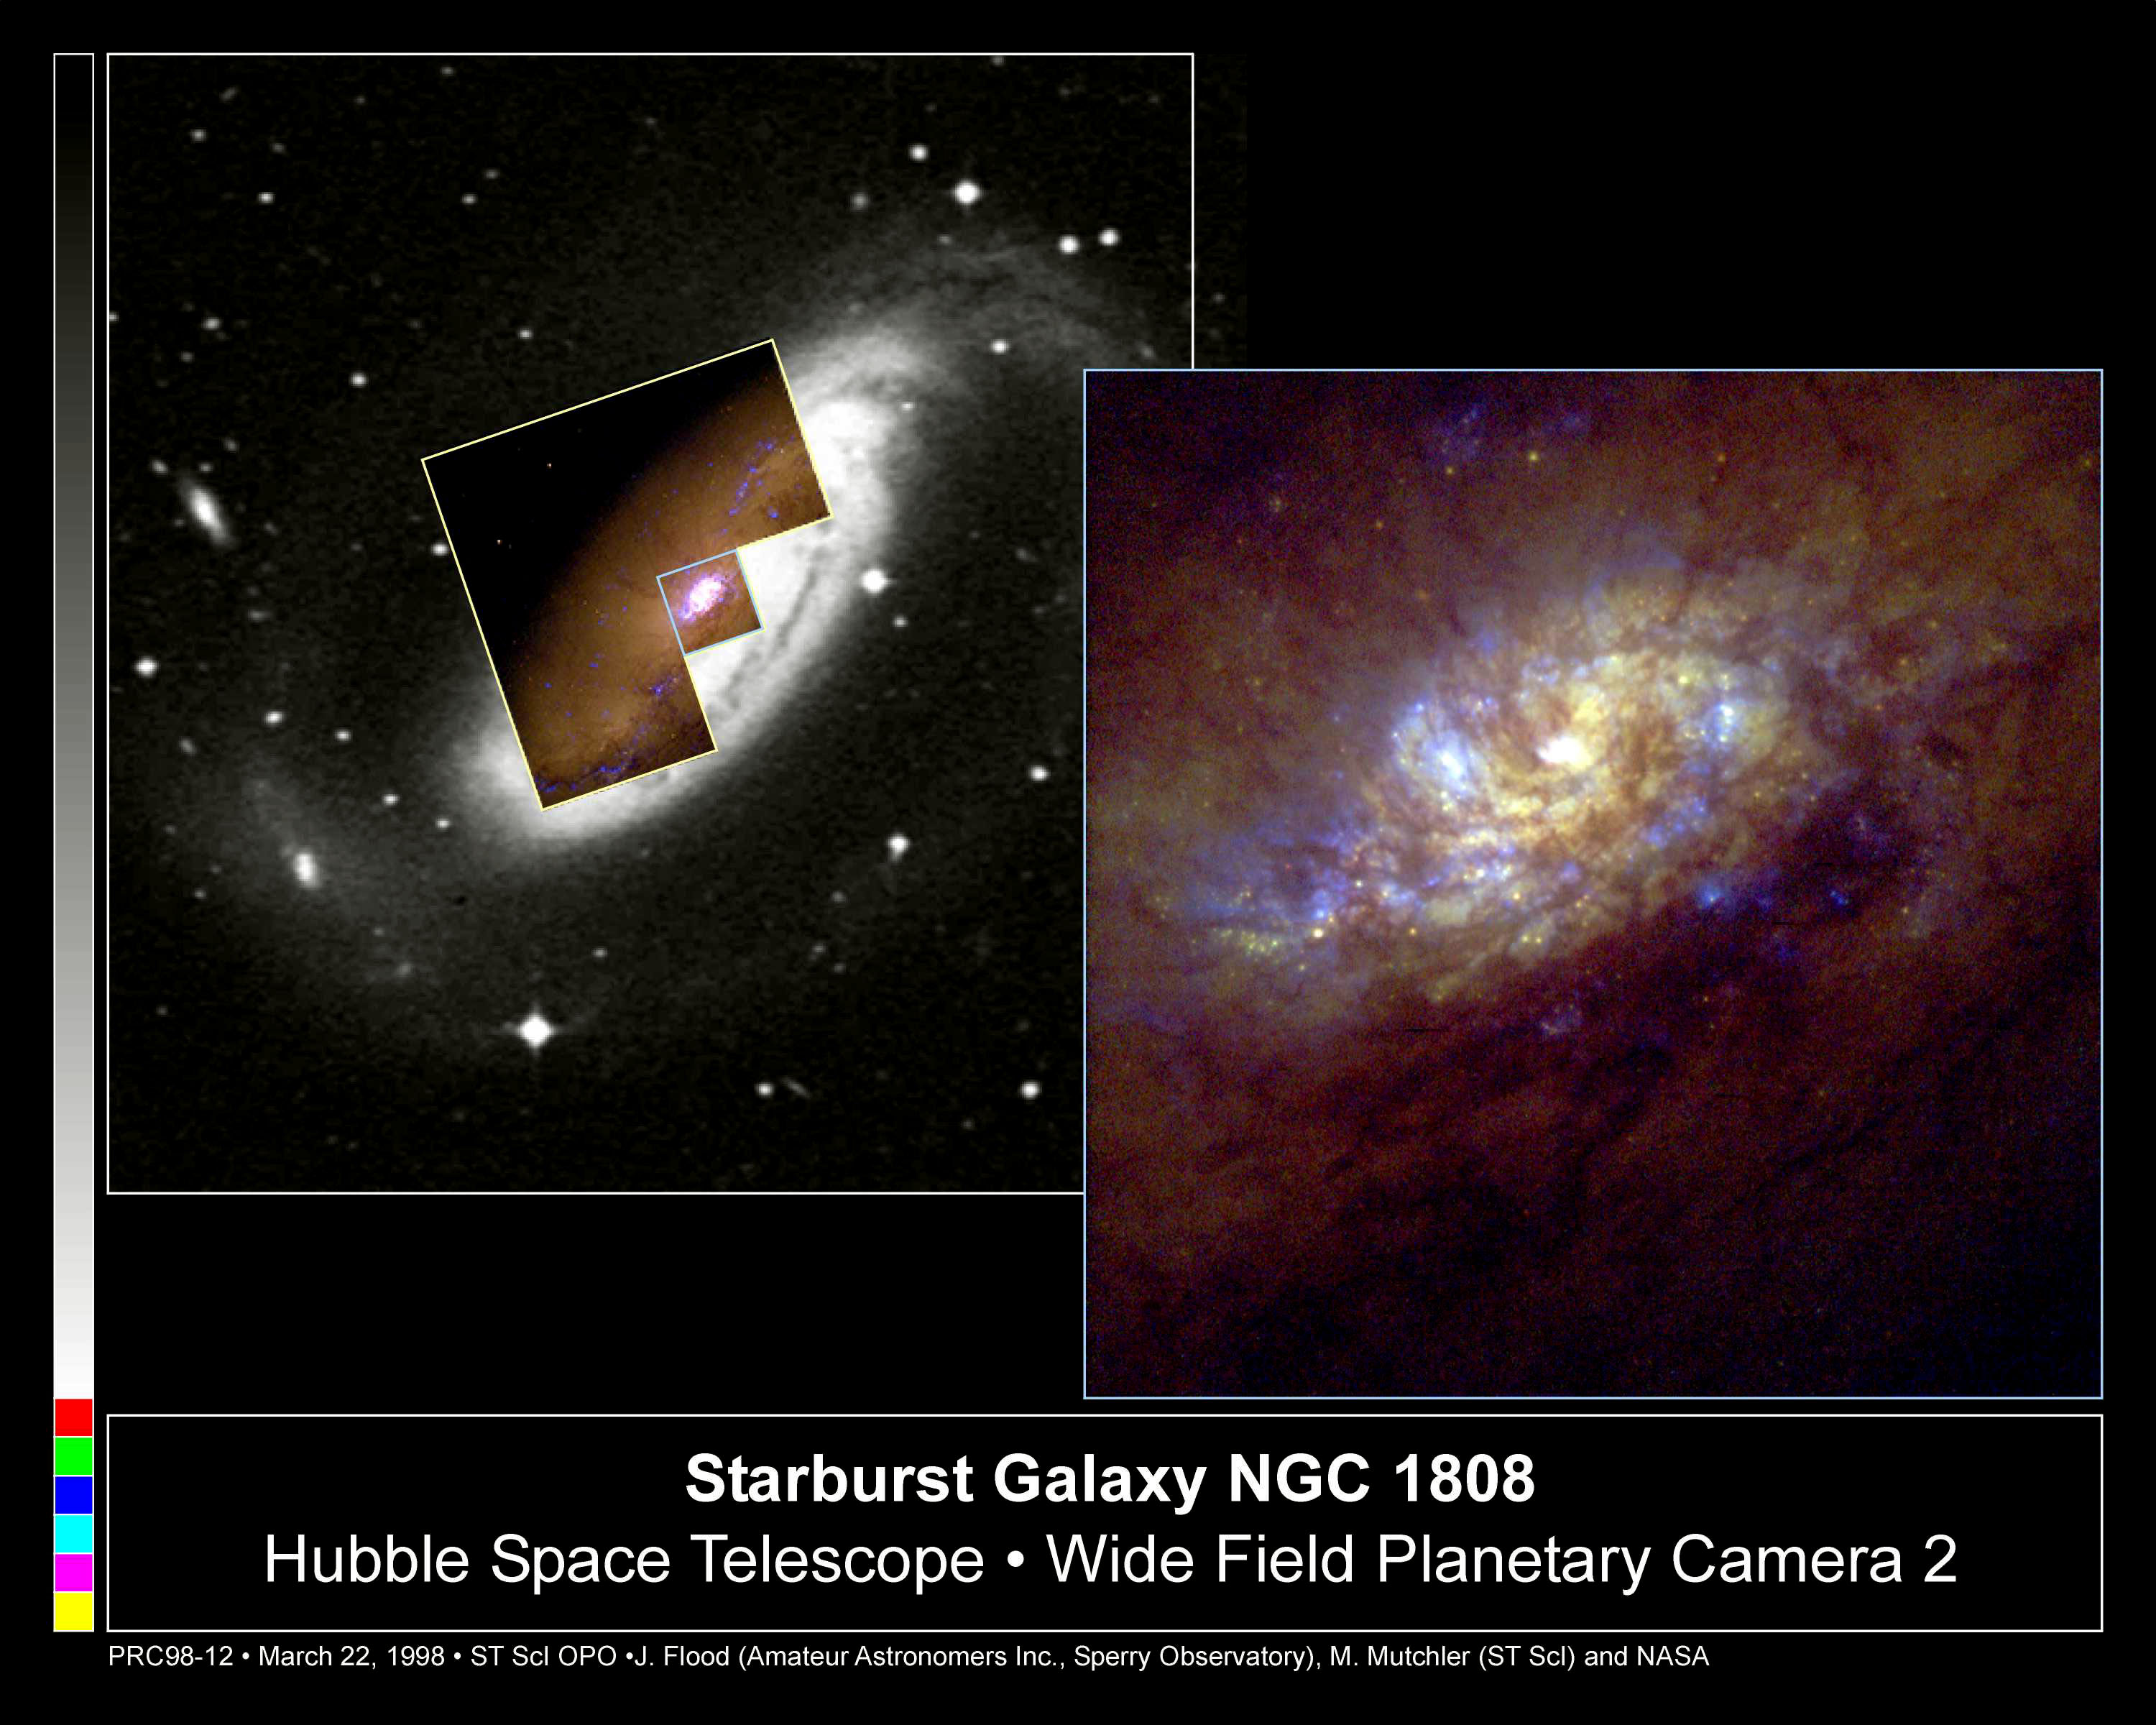

Starburst galaxy NGC 1808

NASA/ESA Hubble Space Telescope's Wide Field and Planetary Camera 2(WFPC2) has captured a flurry of star birth near the heart of the barred spiral galaxy NGC 1808.

Credit: Jim Flood, an amateur astronomer affiliated with Sperry Observatory at Union College in New Jersey, and Max Mutchler, a member of the Space Telescope Science Institute staff who volunteered to work with Jim